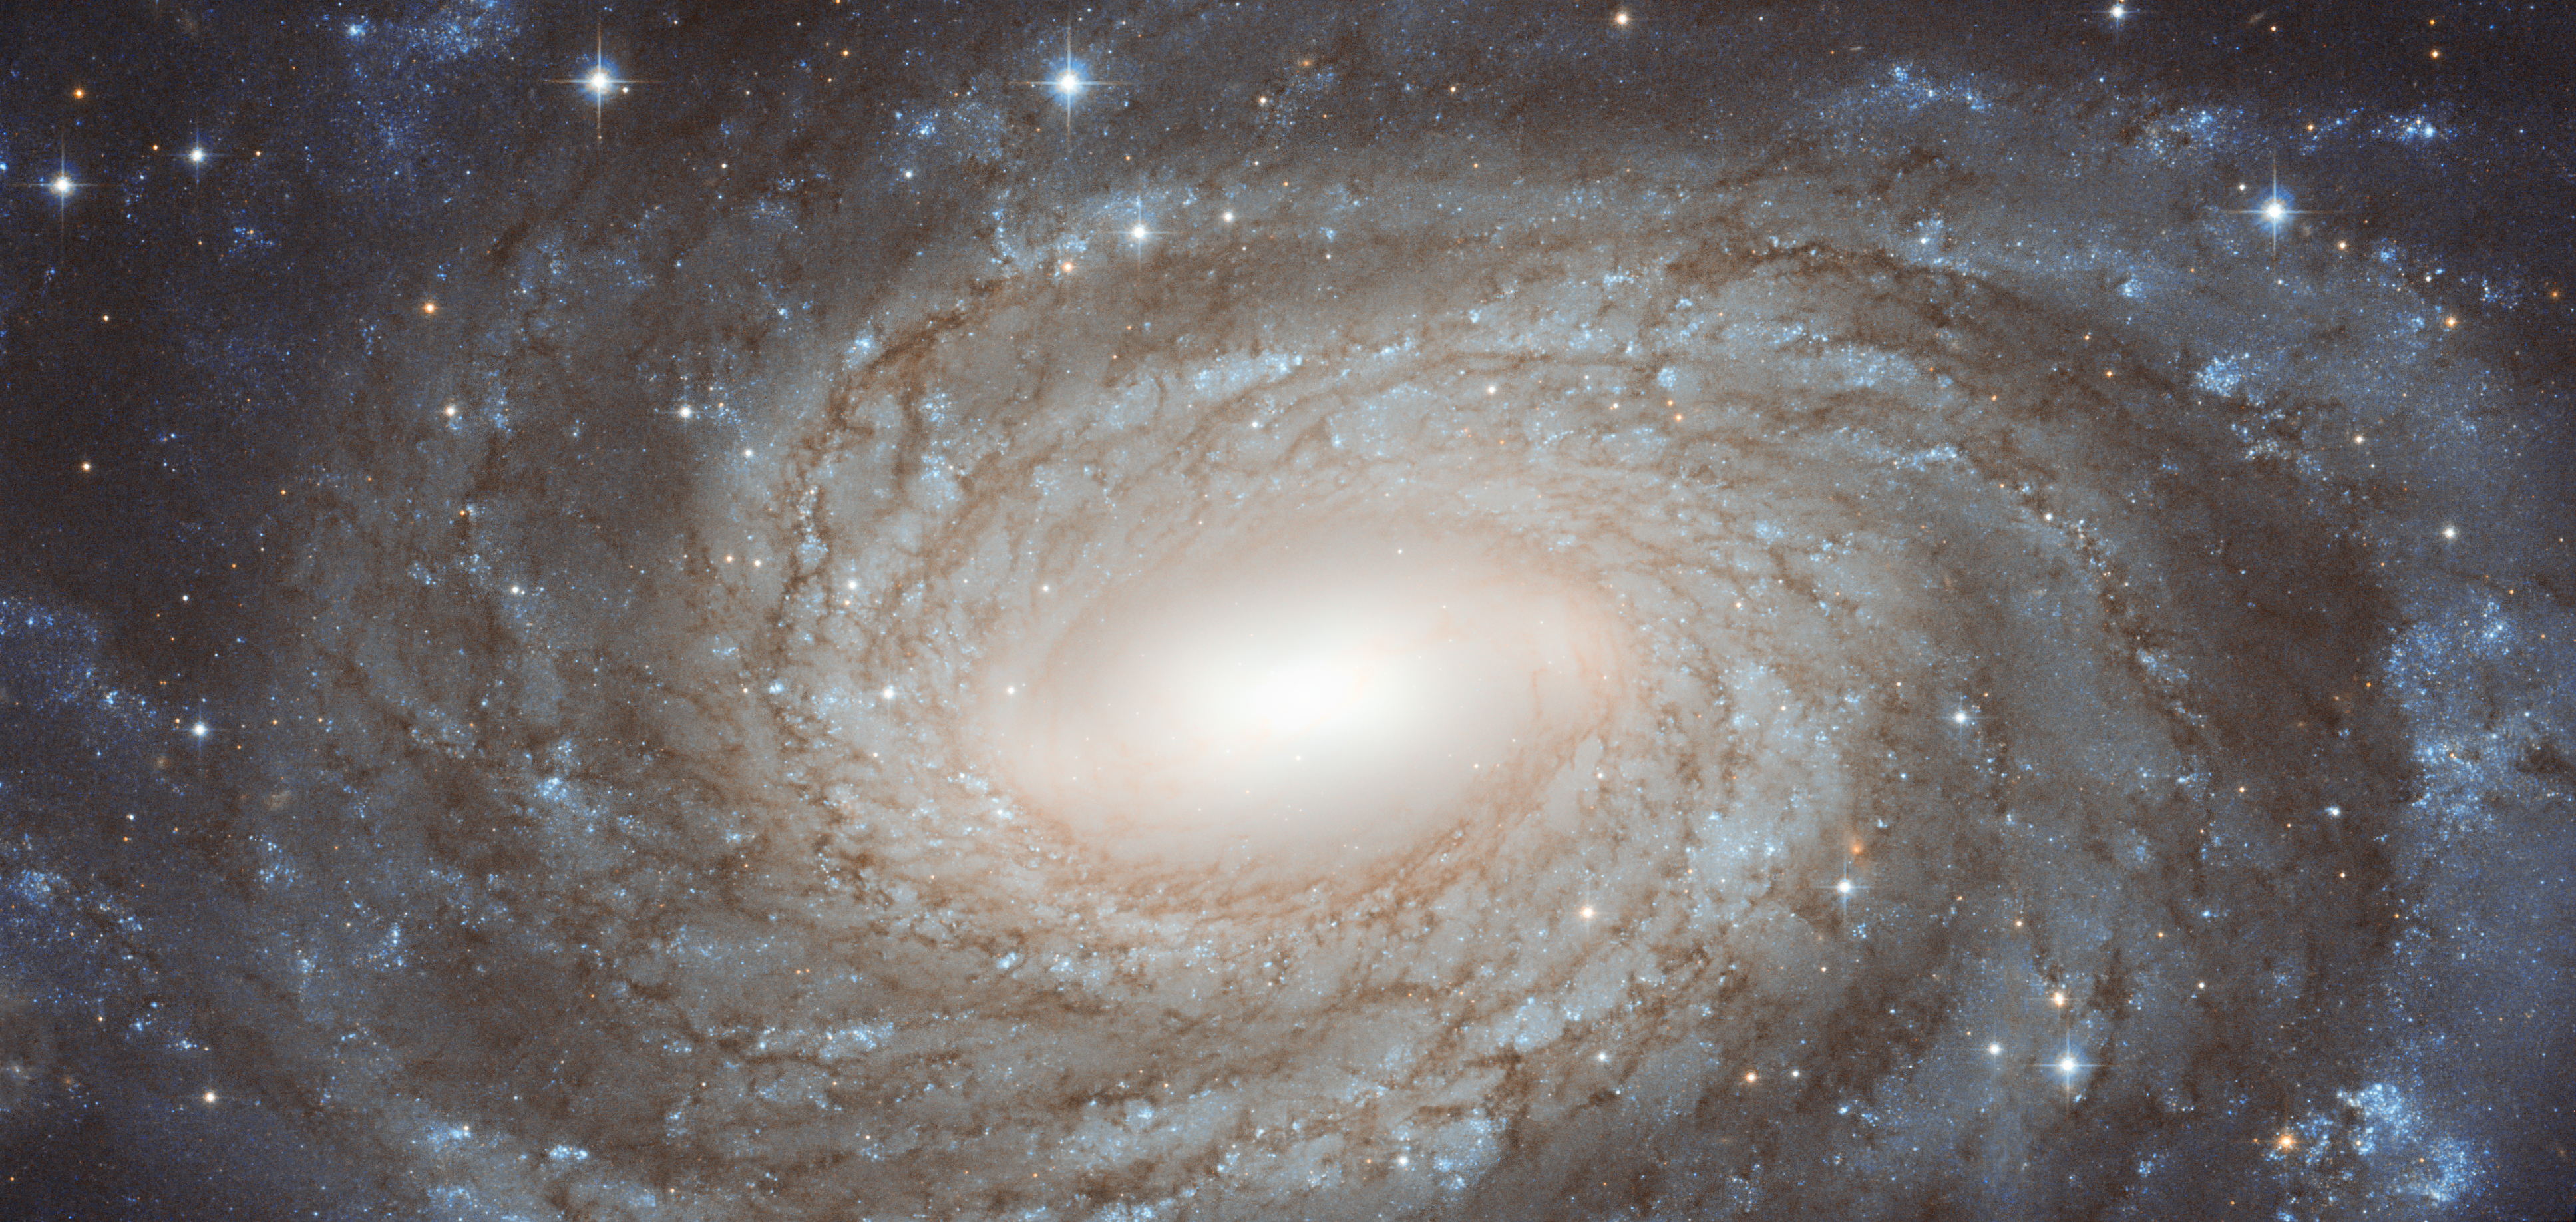

Perfect spiral overlaid with Milky Way gems

The NASA/ESA Hubble Space Telescope has produced this finely detailed image of the beautiful spiral galaxy NGC 6384. This galaxy lies in the constellation of Ophiuchus (The Serpent Bearer), not far from the centre of the Milky Way on the sky. The positioning of NGC 6384 means that we have to peer at it past many dazzling foreground Milky Way stars that are scattered across this image.

In 1971, one member of NGC 6384 stood out against these bright foreground stars when one of its stars exploded as a supernova. This was a Type Ia supernova, which occurs when a compact star that has ceased fusion in its core, called a white dwarf, increases its mass beyond a critical limit by gobbling up matter from a companion star. A runaway nuclear explosion then makes the star suddenly as bright as a whole galaxy.

While many stars have already come to the ends of their lives in NGC 6384, in the centre, star formation is being fuelled by the galaxy’s bar structure; astronomers think such galactic bars funnel gas inwards, where it accumulates to form new stars.

This picture was created from images take with the Wide Field Channel of Hubble’s Advanced Camera for Surveys. An image taken through a blue filter (F435W, coloured blue) was combined with an image taken through a near-infrared filter (F814W, coloured red). The total exposure times were 1050 s through each filter and the field of view is about 3 x 1.5 arcminutes.

Credit: ESA/Hubble & NASA